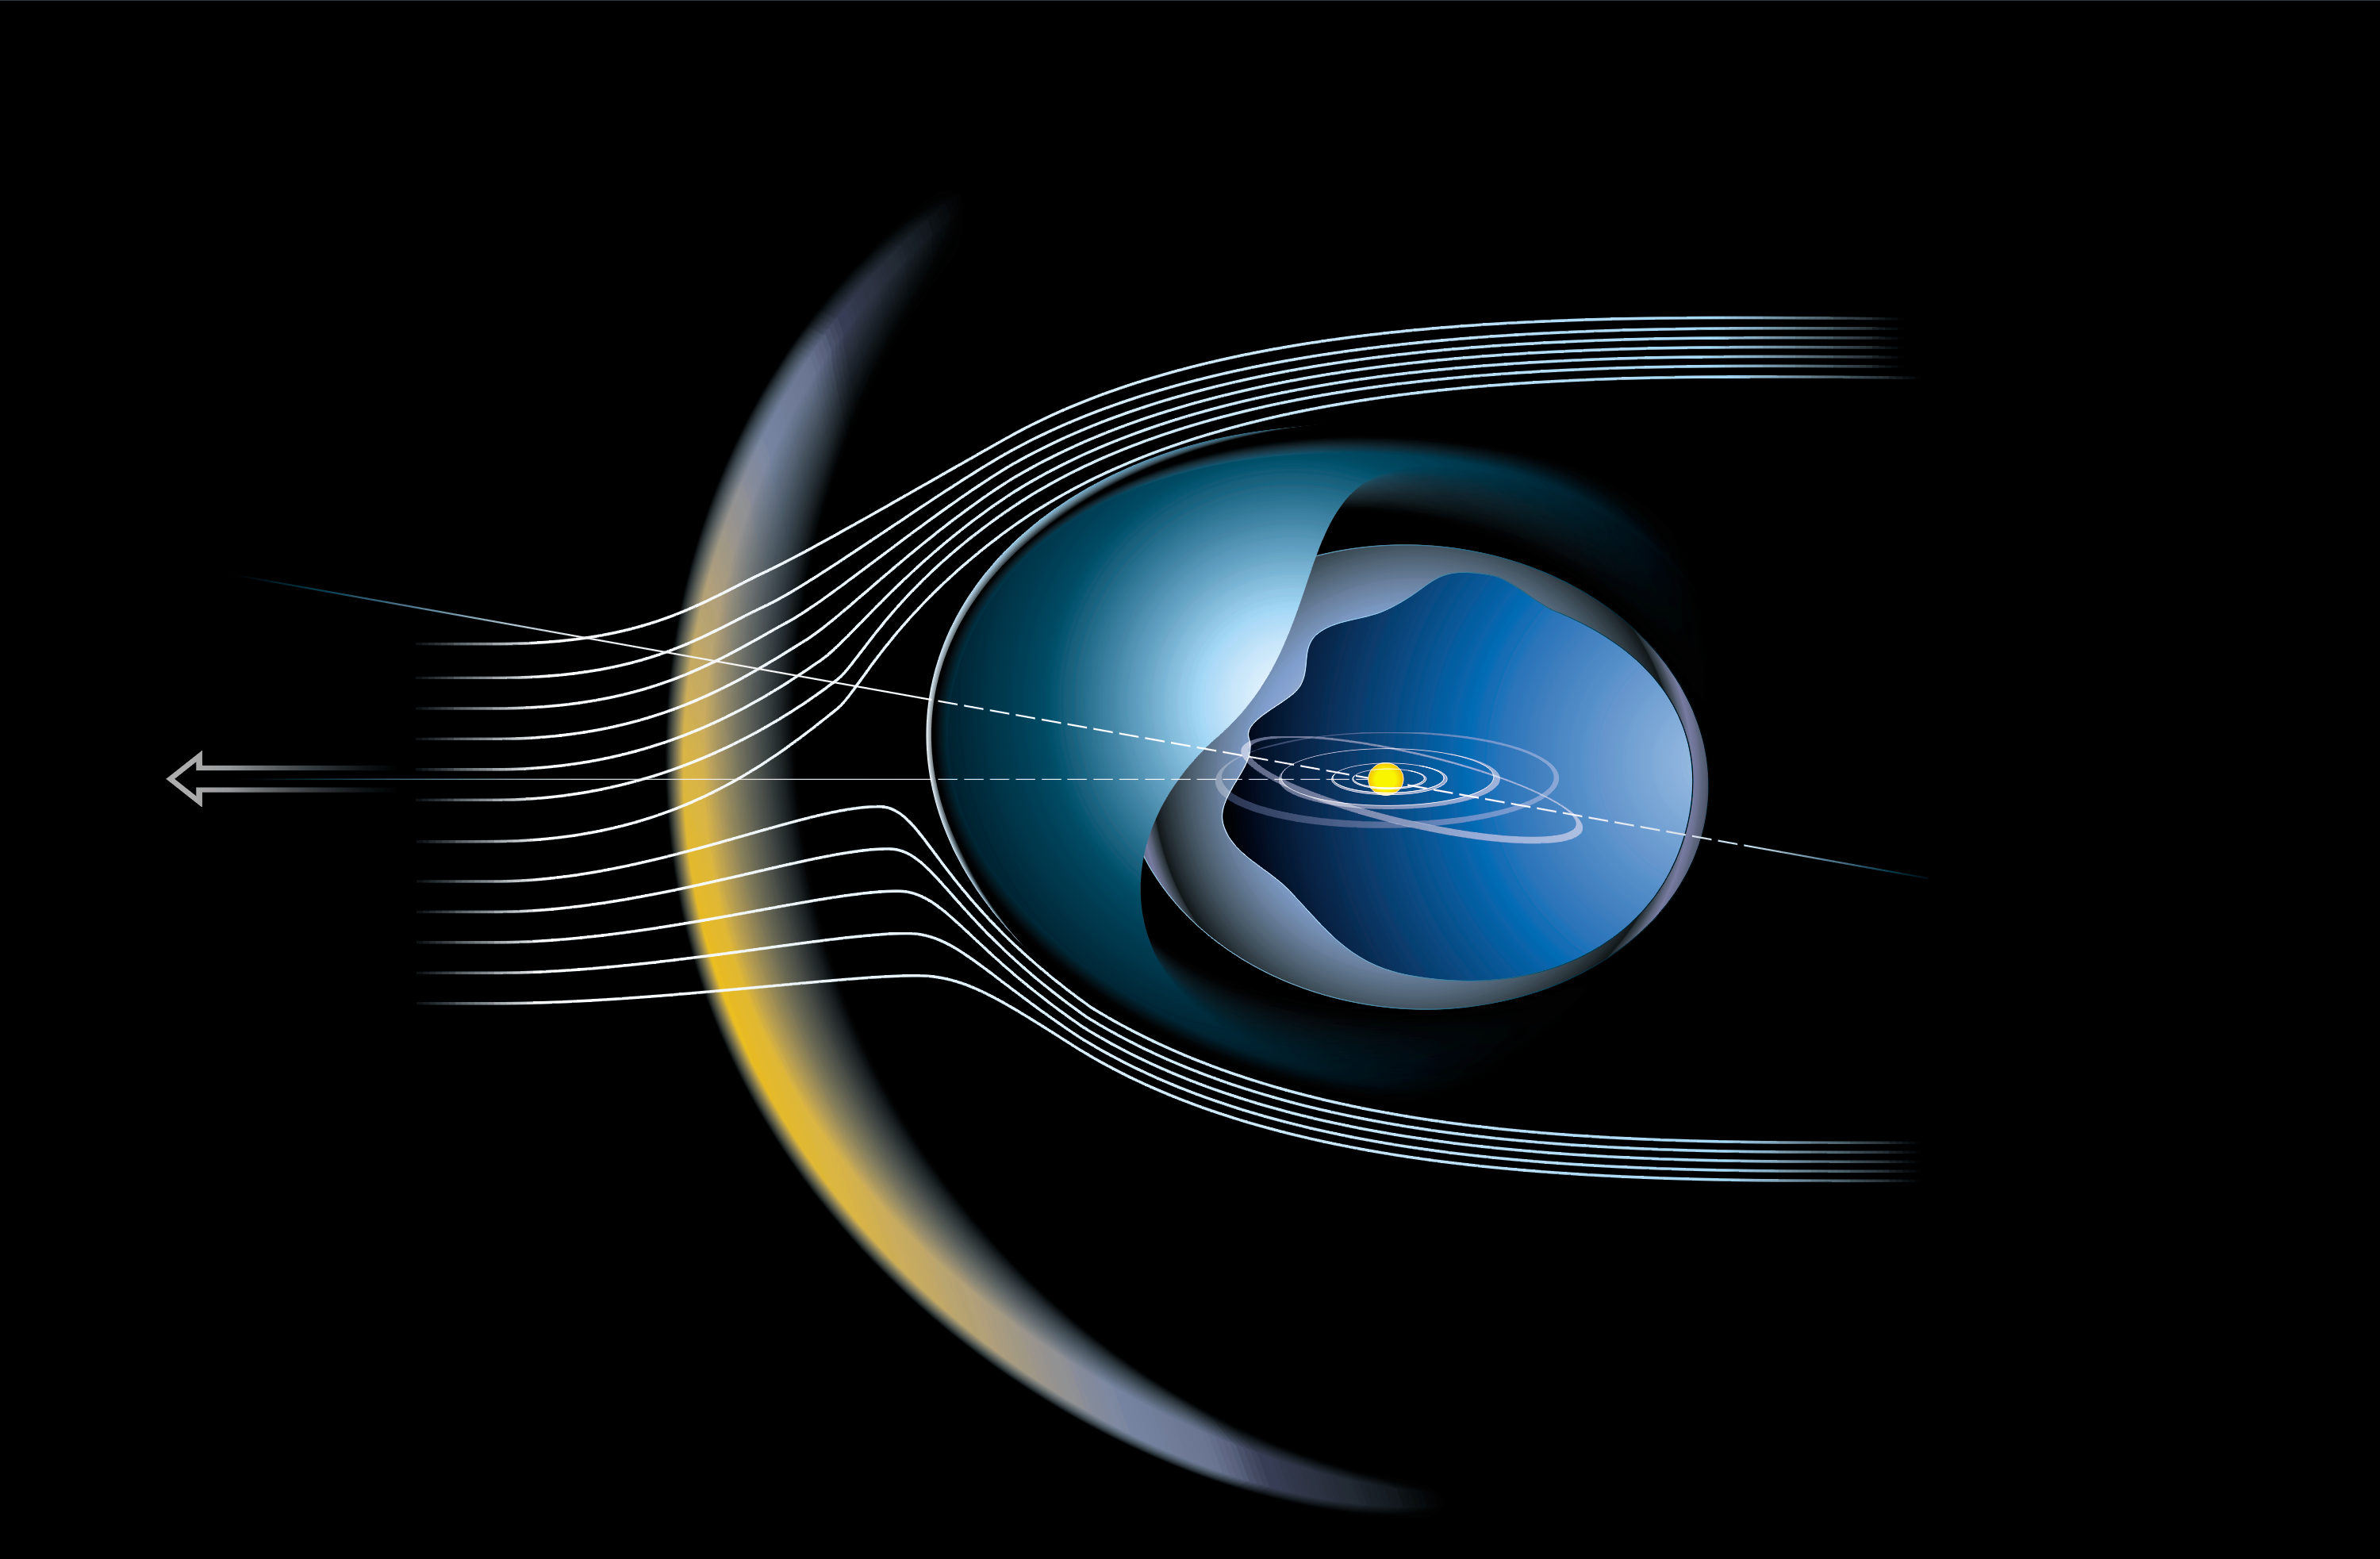

The Heliosphere is Tilted and the Bow Shock Really Exists

This artist's impression depicts the local region of space around the Solar System reflecting new discoveries by European scientists using observations from the Hubble Space Telescope and Voyager.

Credit: ESA & Lotfi Ben Jaffel (Institut d'Astrophysique de Paris (CNRS-INSU)), Martin Kornmesser, Lars Lindberg Christensen (Space Telescope-European Coordination Facility)